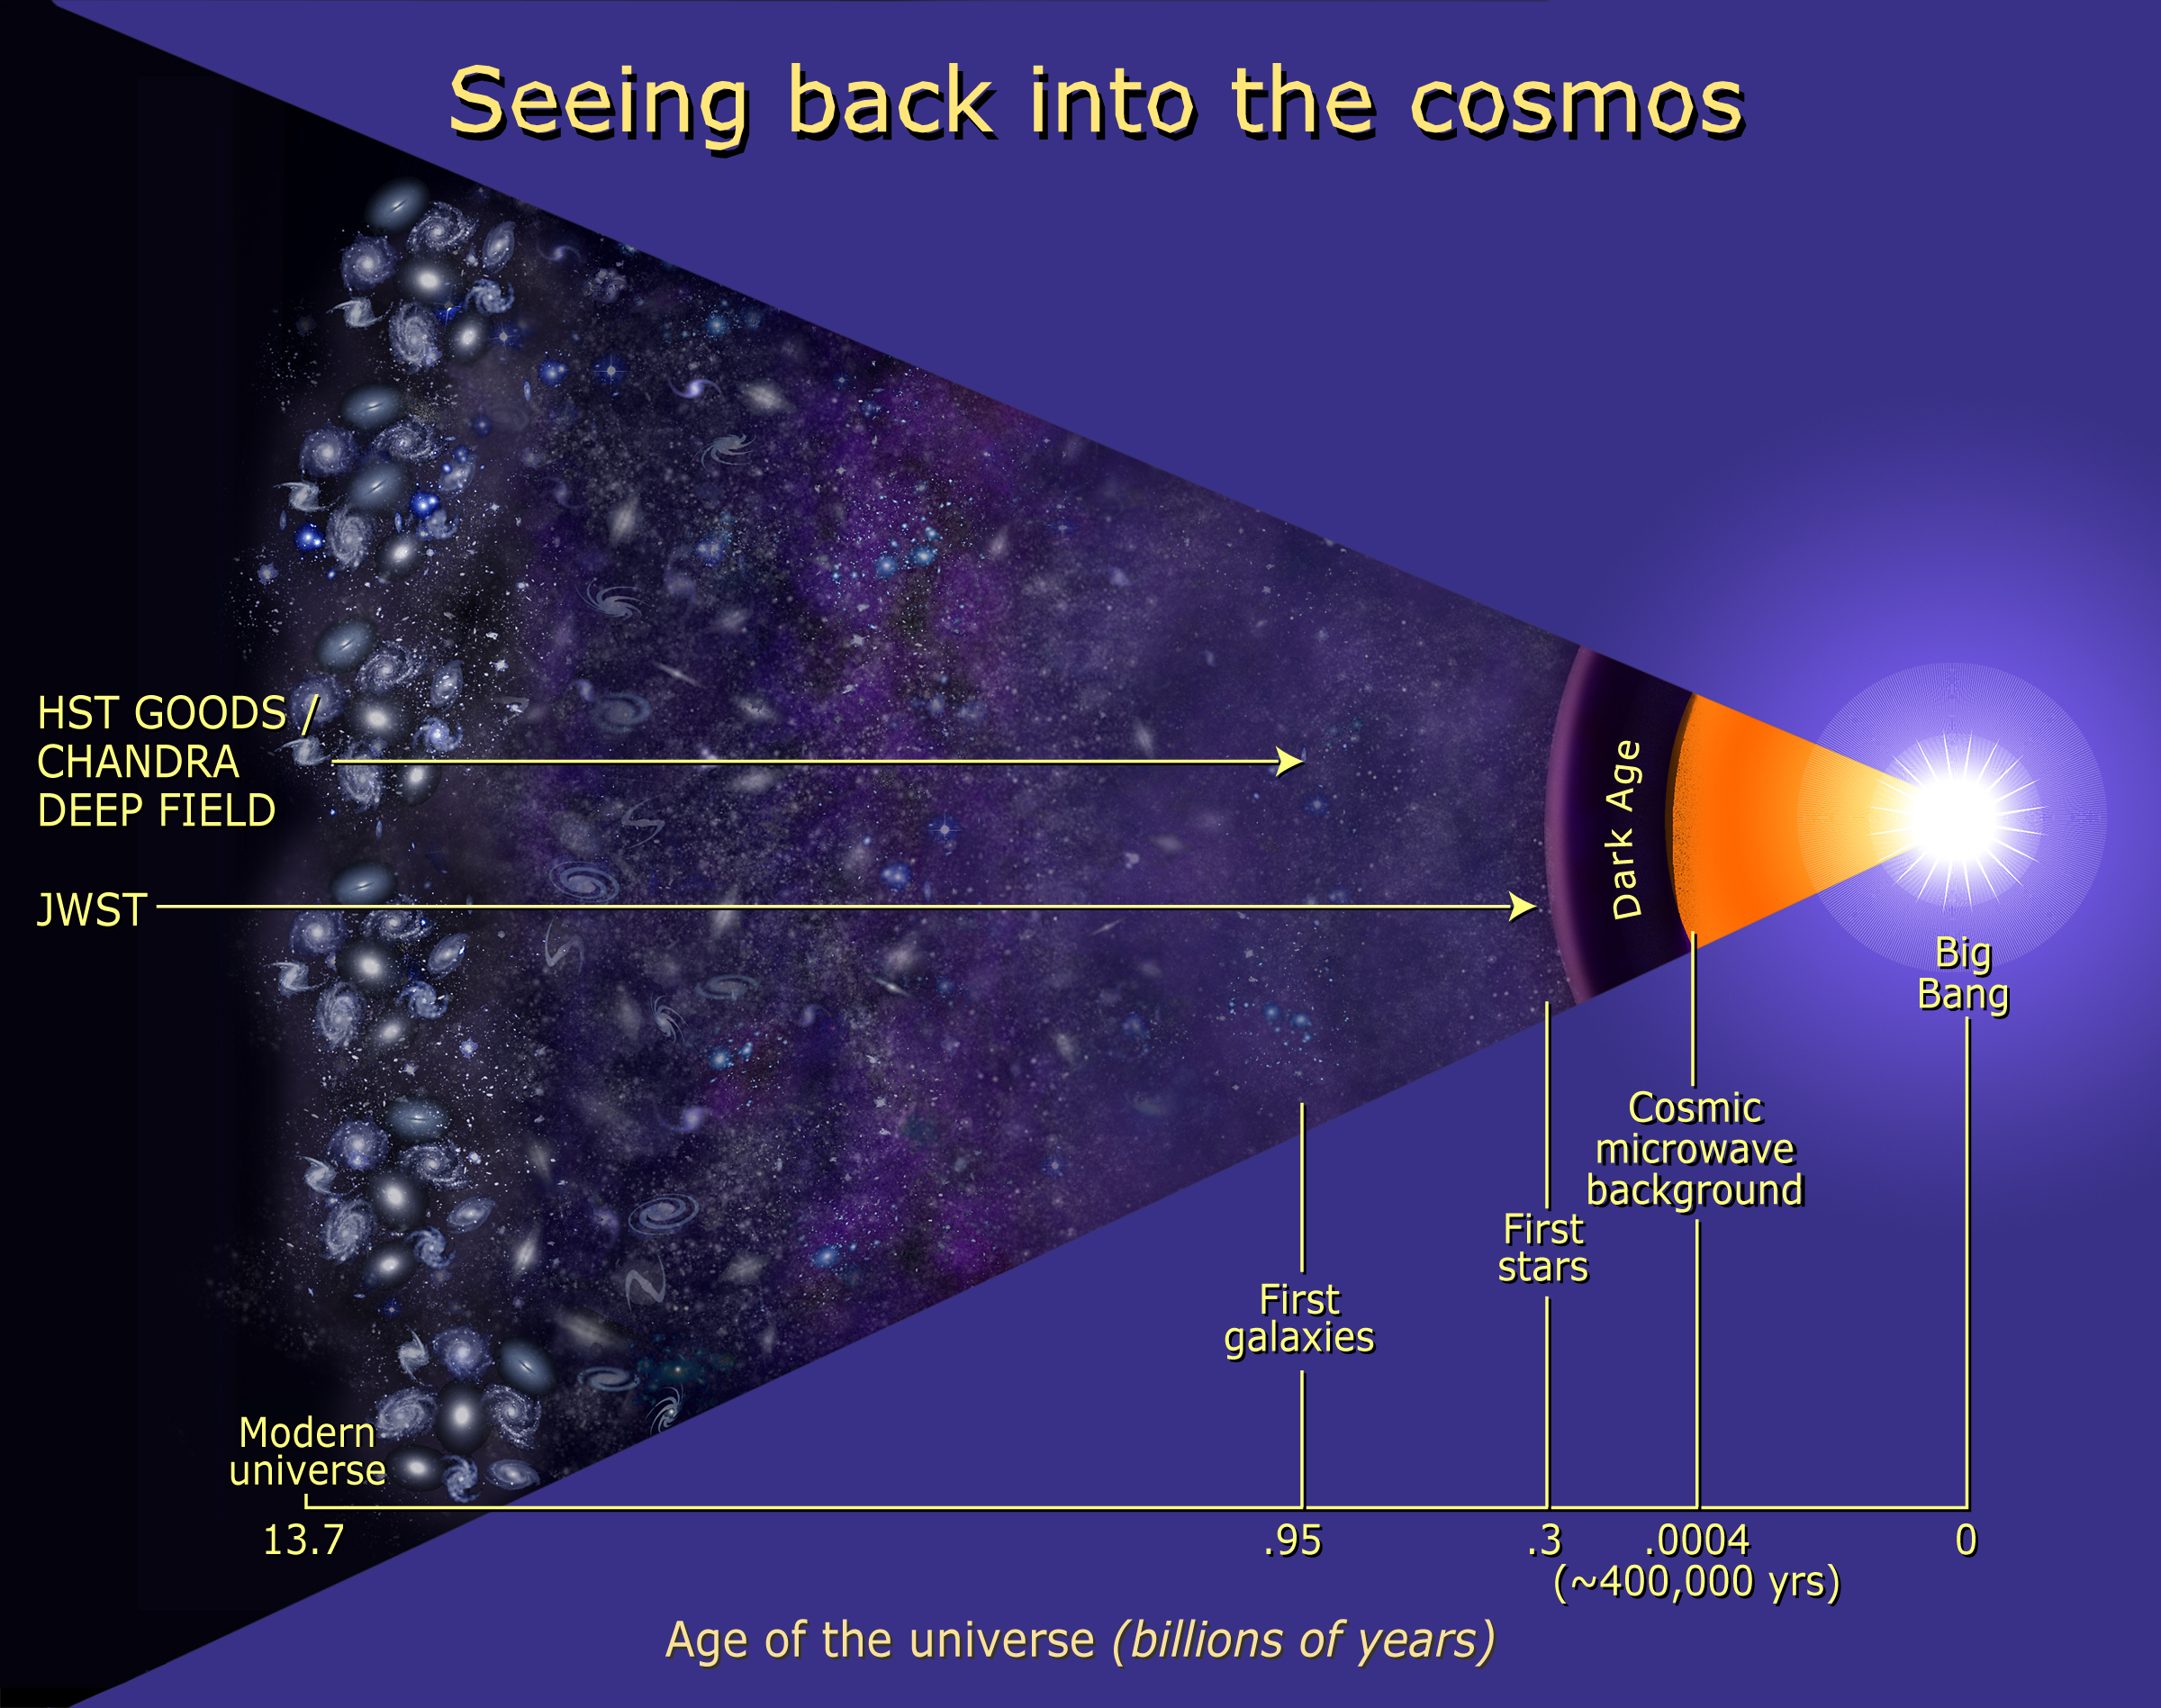

Cosmic timeline

Observatories continue to reach farther back in time to study the evolution of stars and galaxies. This illustration shows that the Chandra X-ray Observatory and the Hubble Space Telescope's Advanced Camera for Surveys looked back billions of years to see the first galaxies. Their combined effort was part of the Great Observatories Origins Deep Survey (GOODS). Hubble's successor, the James Webb Space Telescope (JWST), will gaze even farther back in time to the birth of the first stars.

Credit: NASA/ESA and Ann Feild (STScI)